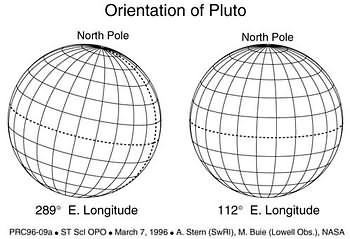

Orientation of Pluto

This is an illustration of Pluto's orientation.

Credit: A. Stern (SwRI), M. Buie (Lowell obs.) and NASA/ESA